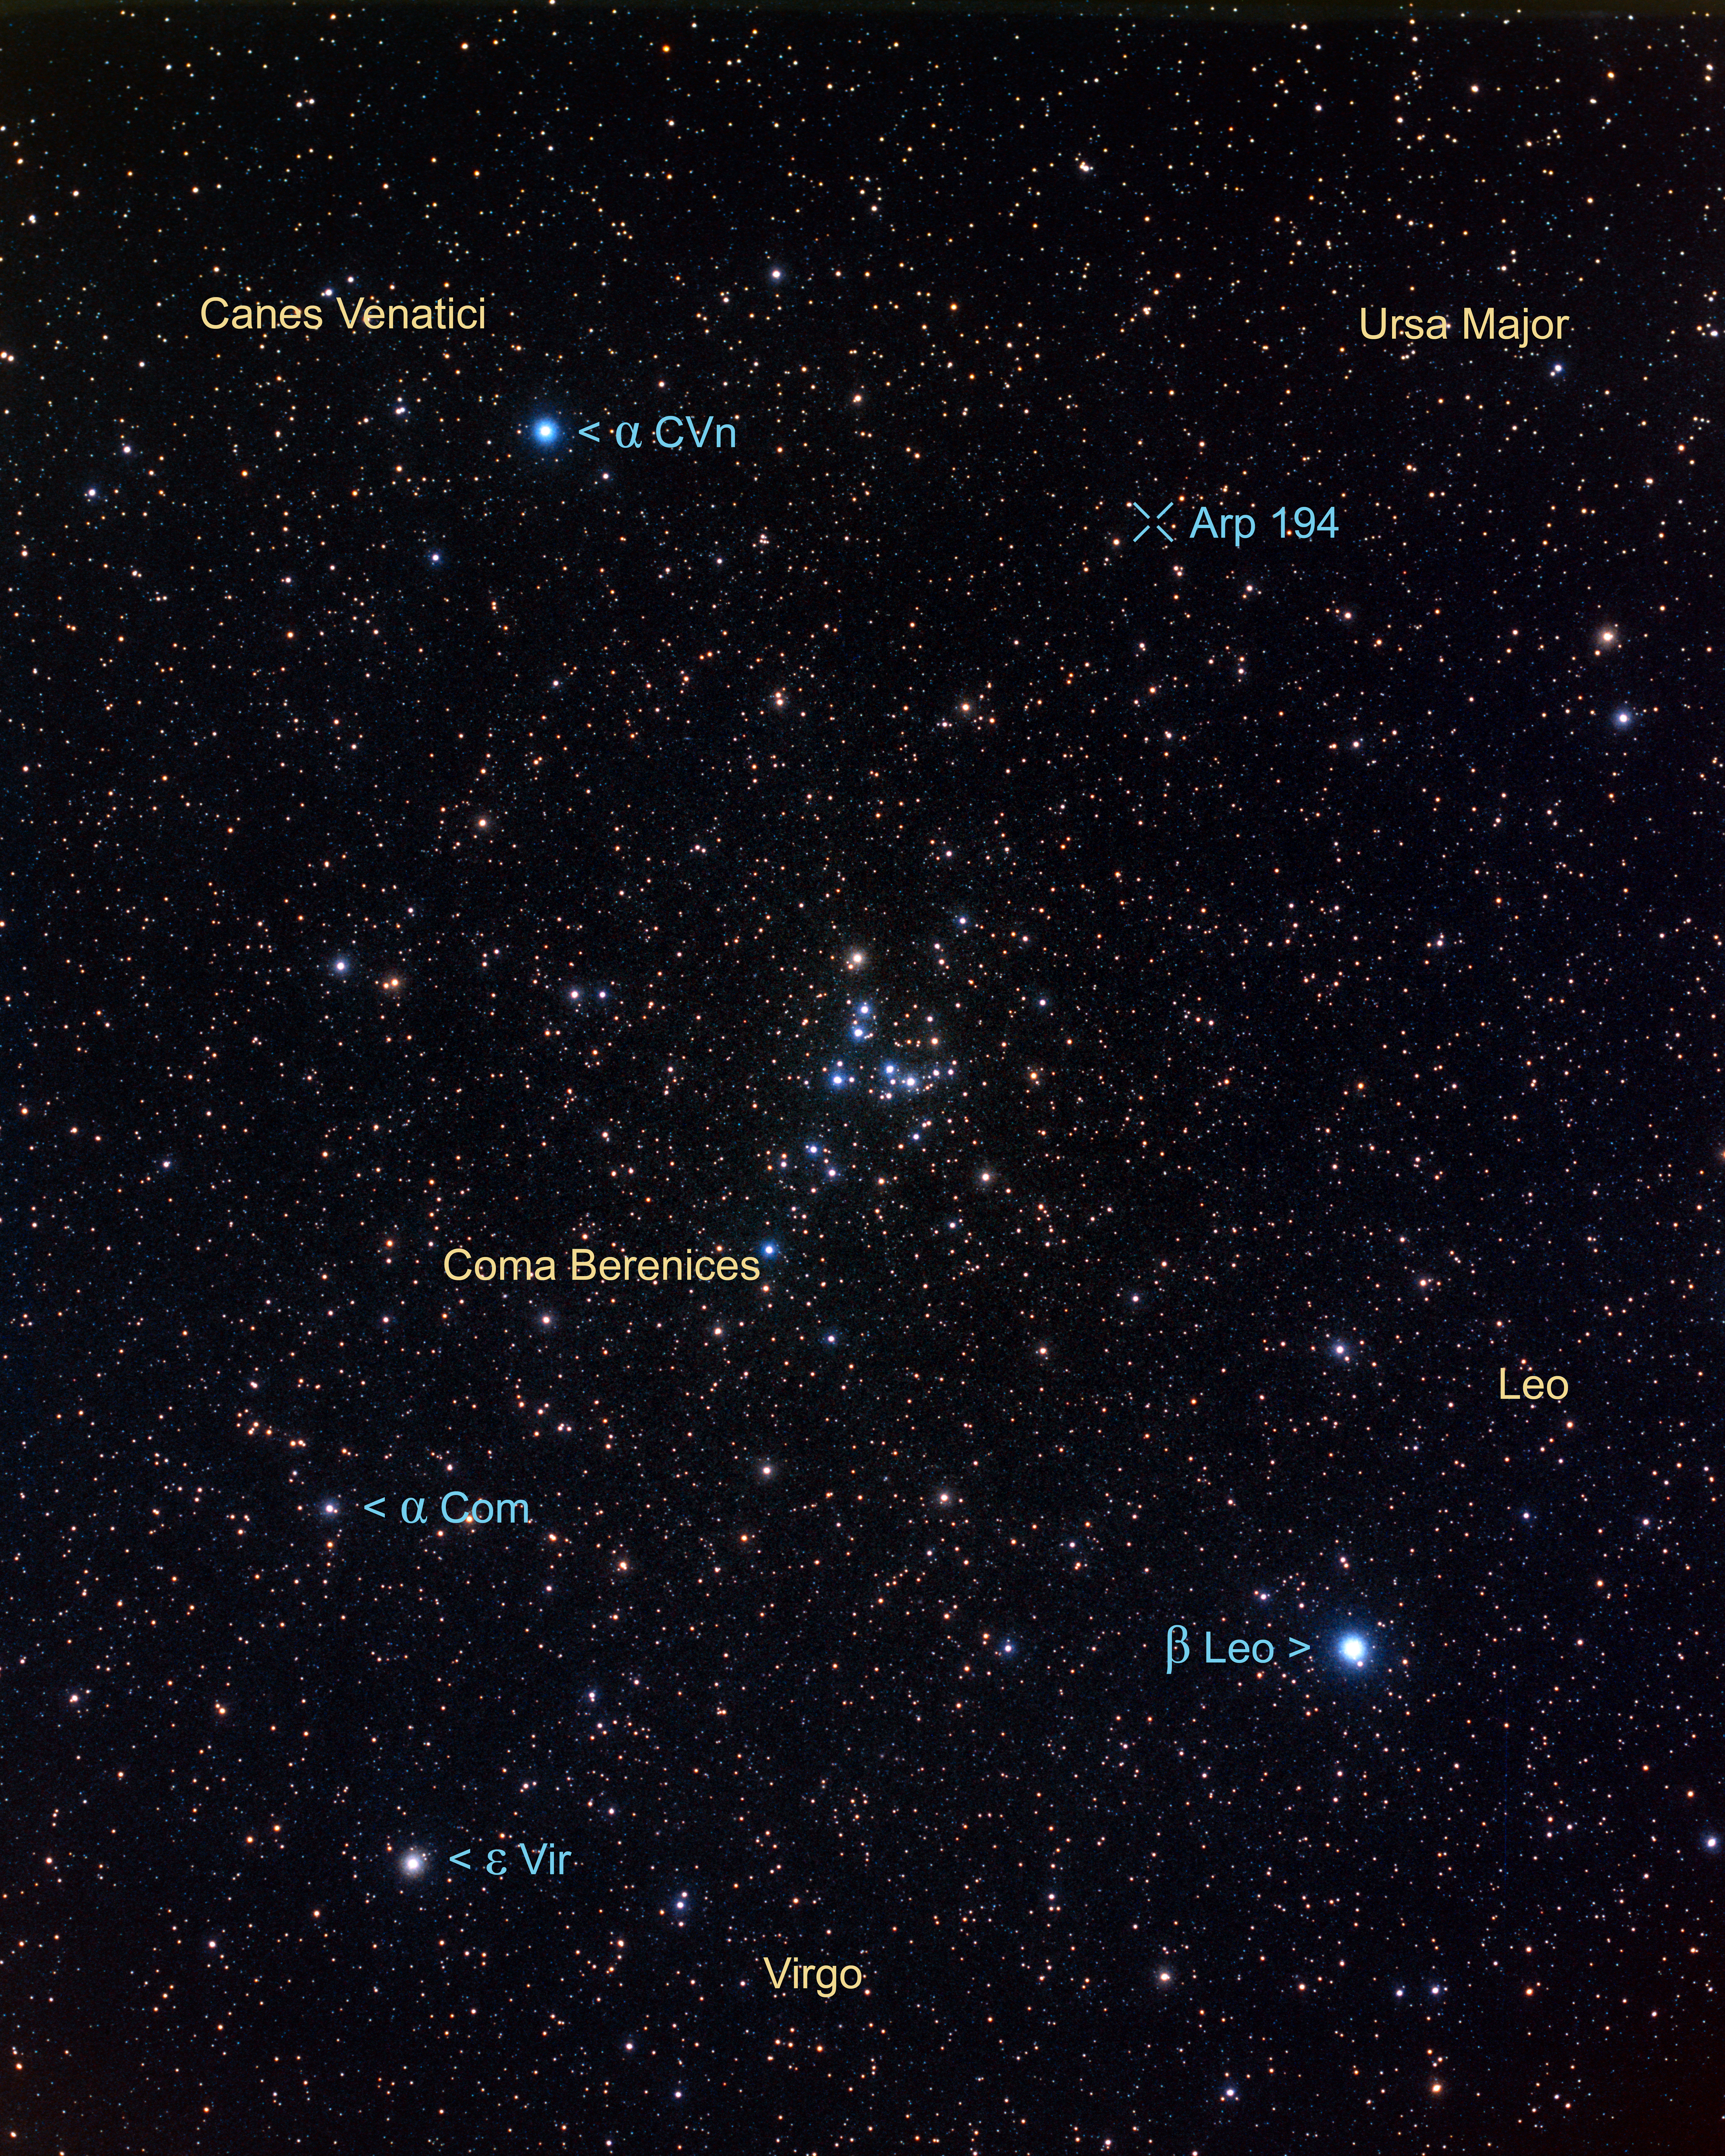

Constellation region near Arp 194 (ground-based image)

This picture, taken with a small ground-based camera, highlights the part of the northern sky that includes: Ursa Major, Coma Berenices, Canes Venatici and Cepheus. Arp 194 lies within the constellation of Cepheus, just below and to the left of the "foot" of the Great Bear (Ursa Major).

Credit: NASA, ESA Z. Levay and A. Fujii